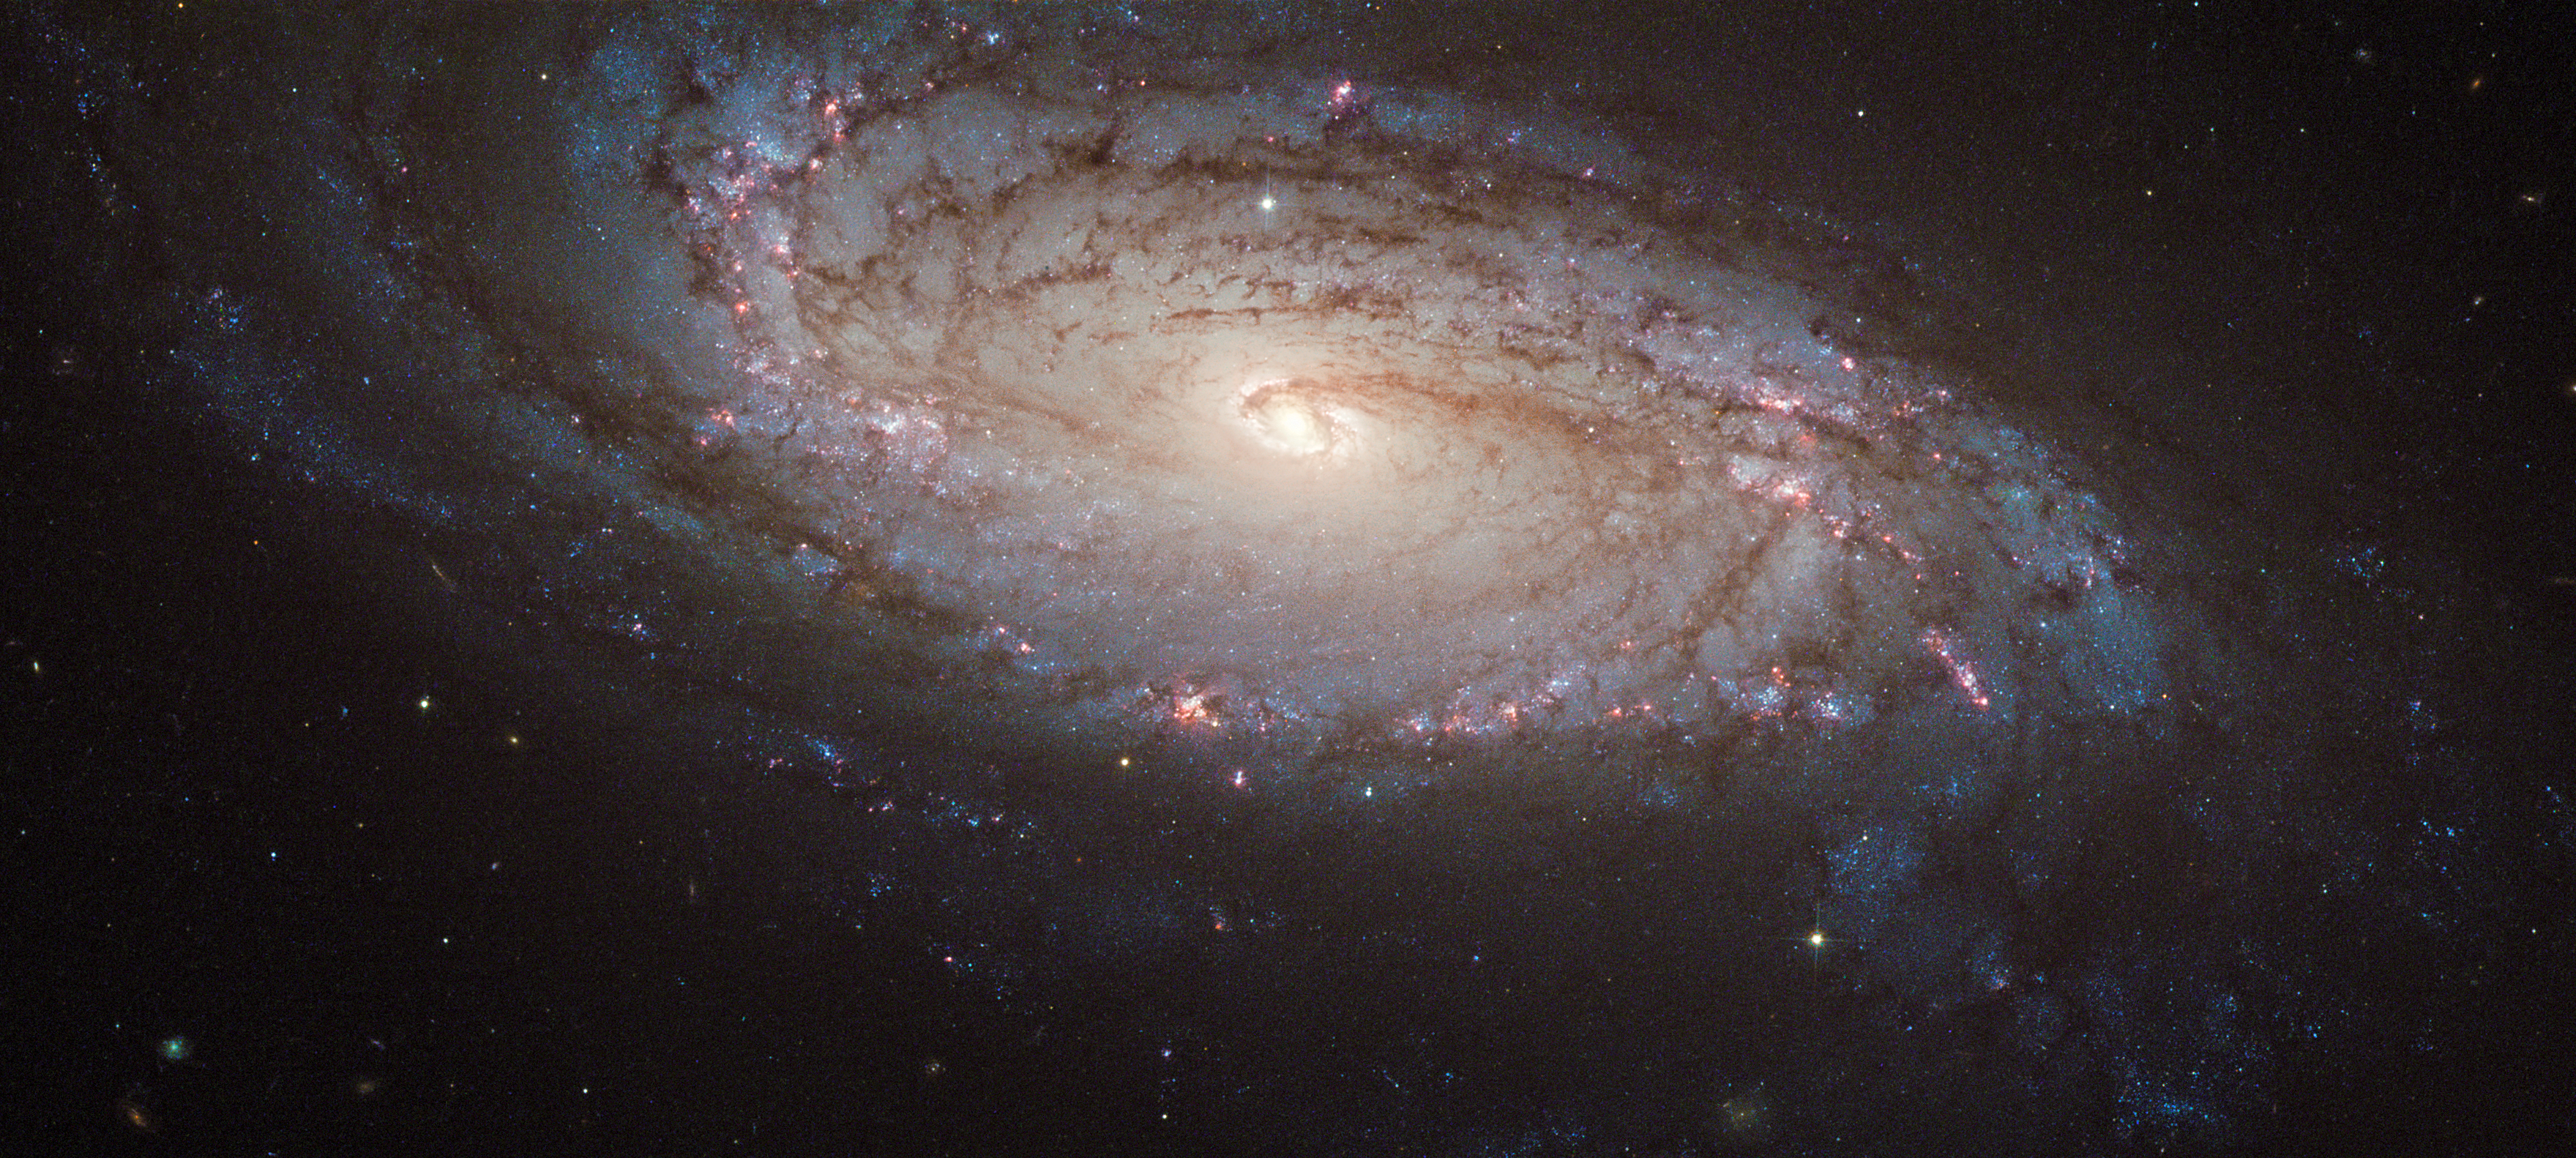

Spotting a supernova in NGC 5806

A new image from the NASA/ESA Hubble Space Telescope shows NGC 5806, a spiral galaxy in the constellation Virgo (the Virgin). It lies around 80 million light years from Earth. Also visible in this image is a supernova explosion called SN 2004dg.

The exposures that are combined into this image were carried out in early 2005 in order to help pinpoint the location of the supernova, which exploded in 2004. The afterglow from this outburst of light, caused by a giant star exploding at the end of its life, can be seen as a faint yellowish dot near the bottom of the galaxy.

NGC 5806 was chosen to be one of a number of galaxies in a study into supernovae because Hubble’s archive already contained high resolution imagery of the galaxy, collected before the star had exploded. Since supernovae are both relatively rare, and impossible to predict with any accuracy, the existence of such before-and-after images is precious for astronomers who study these violent events.

Aside from the supernova, NGC 5806 is a relatively unremarkable galaxy: it is neither particularly large or small, nor especially close or distant.

The galaxy’s bulge (the densest part in the centre of the spiral arms) is a so-called disk-type bulge, in which the spiral structure extends right to the centre of the galaxy, instead of there being a large elliptical bulge of stars present. It is also home to an active galaxy nucleus, a supermassive black hole which is pulling in large amounts of matter from its immediate surroundings. As the matter spirals around the black hole, it heats up and emits powerful radiation.

This image is produced from three exposures in visible and infrared light, observed by Hubble’s Advanced Camera for Surveys. The field of view is approximately 3.3 by 1.7 arcminutes.

A version of this image was entered into the Hubble’s Hidden Treasures Image Processing Competition by contestant Andre van der Hoeven (who won second prize in the competition for his image of Messier 77). Hidden Treasures is an initiative to invite astronomy enthusiasts to search the Hubble archive for stunning images that have never been seen by the general public. The competition has now closed.

Credit: ESA/Hubble & NASA